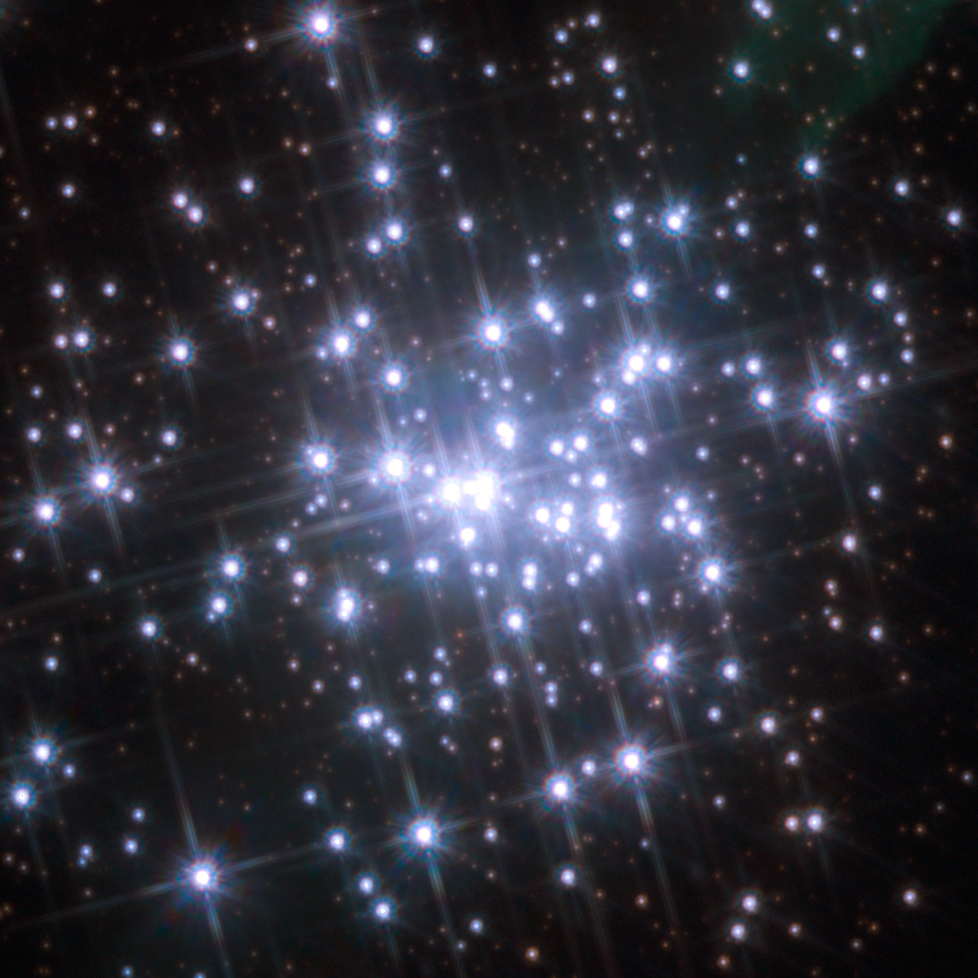

The core of the massive compact star cluster in NGC 3603

The core of the star cluster in NGC 3603 is shown in great detail in an image from the Wide Field Planetary Camera 2 (WFPC2) camera on the NASA/ESA Hubble Space Telescope. The image is a colour composite of observations in the WFPC2 filters F555W (blue), F675W (green) and F814W (red). This view shows the second of two images taken ten years apart that were used to detect the motions of individual stars within the cluster for the first time. The field of view is about 20 arcseconds across.

Credit: NASA, ESA and Wolfgang Brandner (MPIA), Boyke Rochau (MPIA) and Andrea Stolte (University of Cologne)